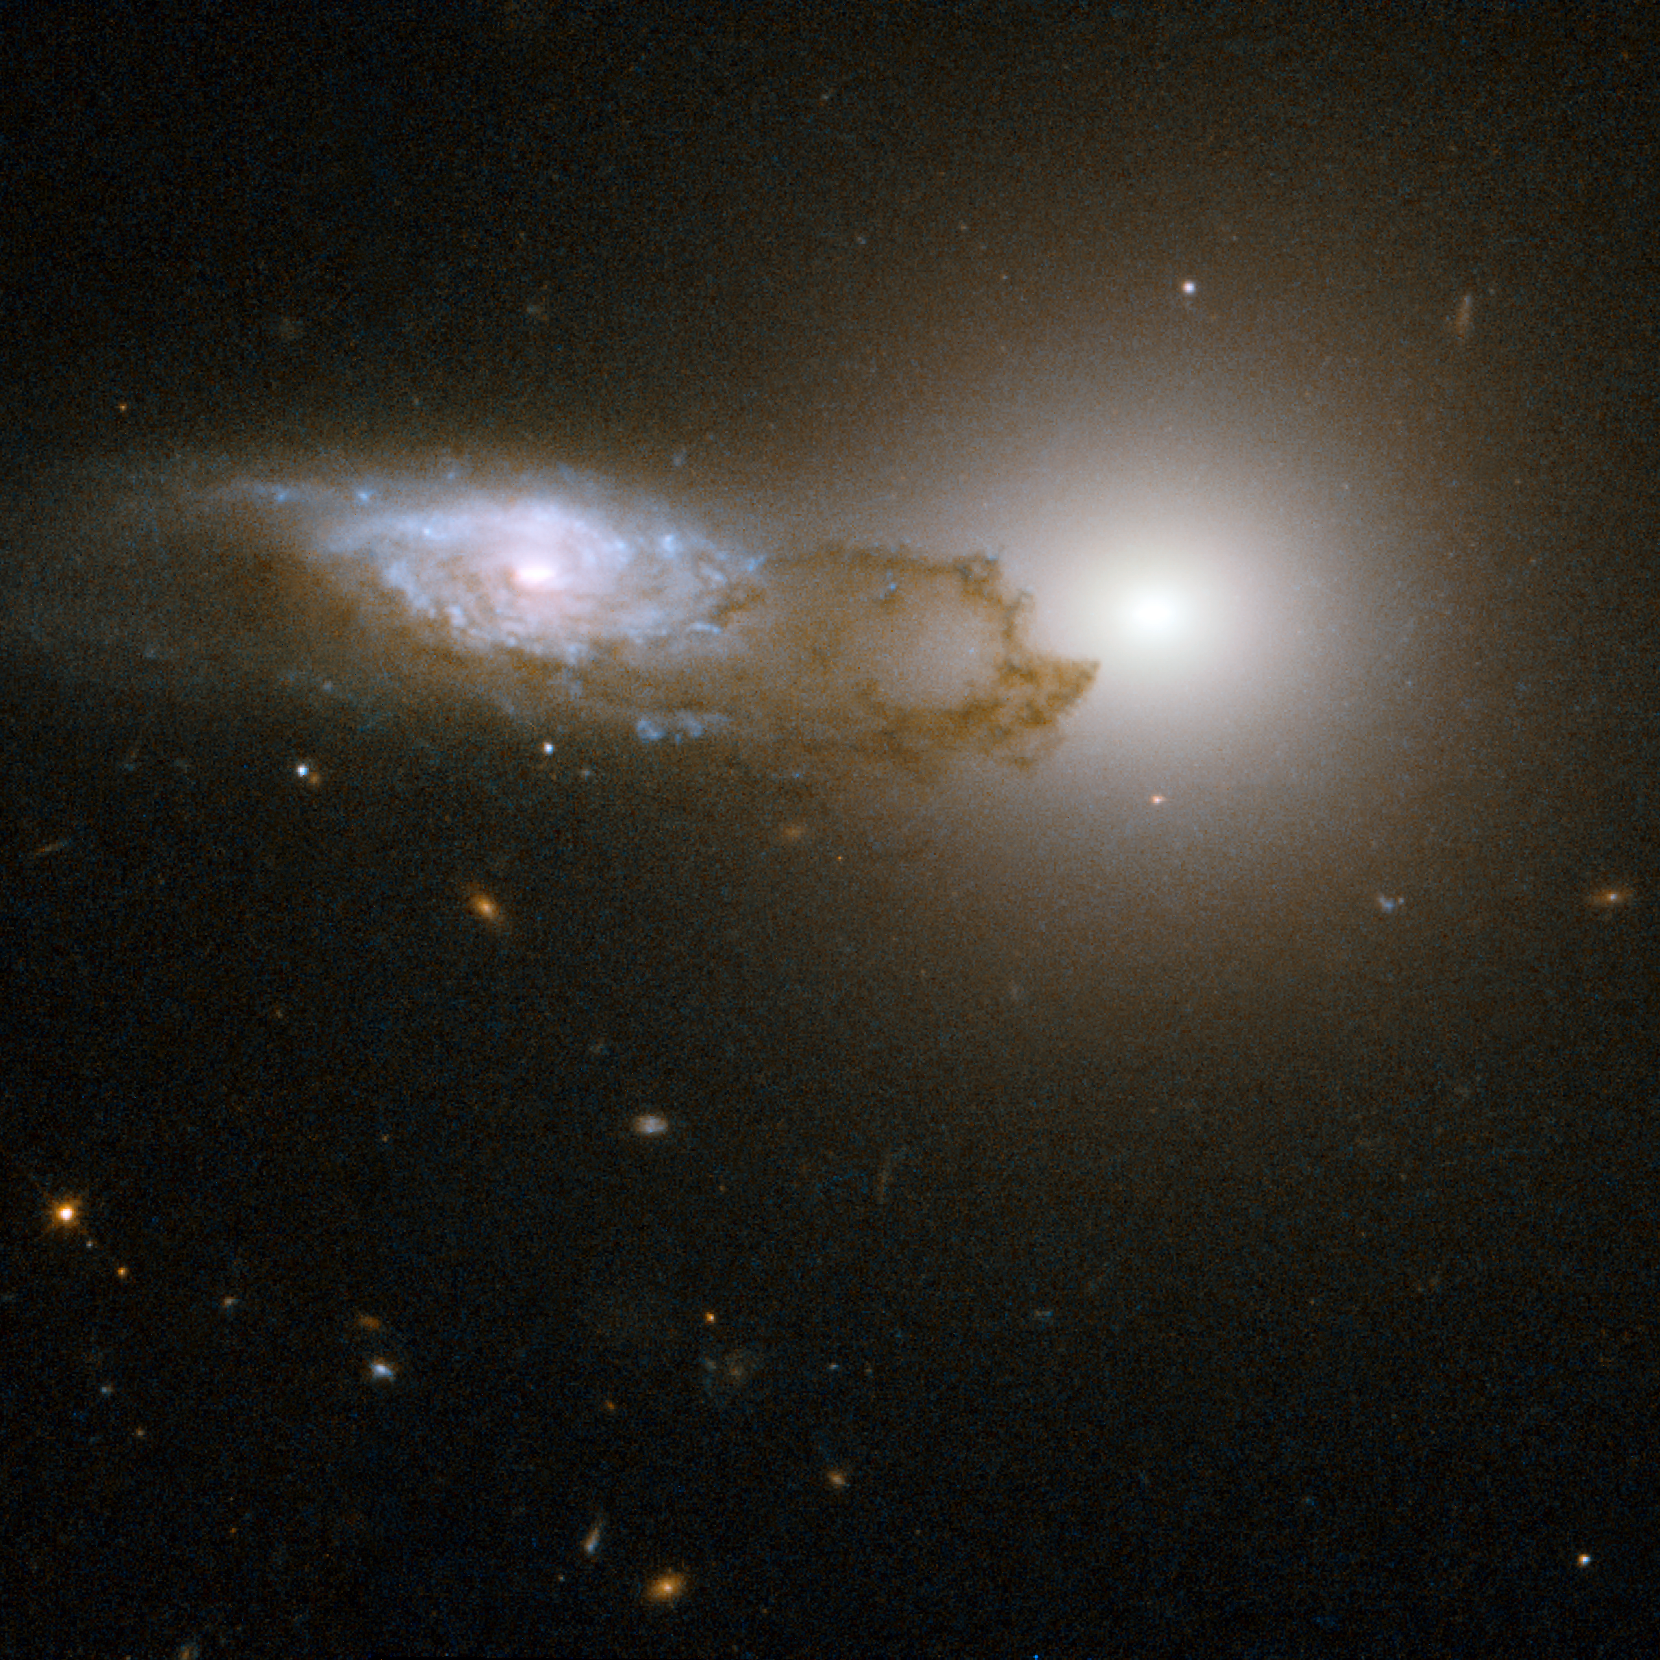

AM1316-241

AM1316-241 is made up of two interacting galaxies - a spiral galaxy (on the left of the frame) in front of an elliptical galaxy (on the right of the frame). The starlight from the background galaxy is partially obscured by the bands and filaments of dust associated with the foreground spiral galaxy. The Hubble image unravels the fine detail in the patchy clumps of dust confined to the spiral arms of the spiral galaxy. This dust reddens the light from the background just as the intervening dust in the Earth's atmosphere reddens sunsets here. AM1316-241 is located some 400 million light years away toward the constellation of Hydra, the Water Snake.

This image is part of a large collection of 59 images of merging galaxies taken by the Hubble Space Telescope and released on the occasion of its 18th anniversary on 24th April 2008.

Credit: NASA, ESA, the Hubble Heritage Team (STScI/AURA)-ESA/Hubble Collaboration and W. Keel (University of Alabama, Tuscaloosa)